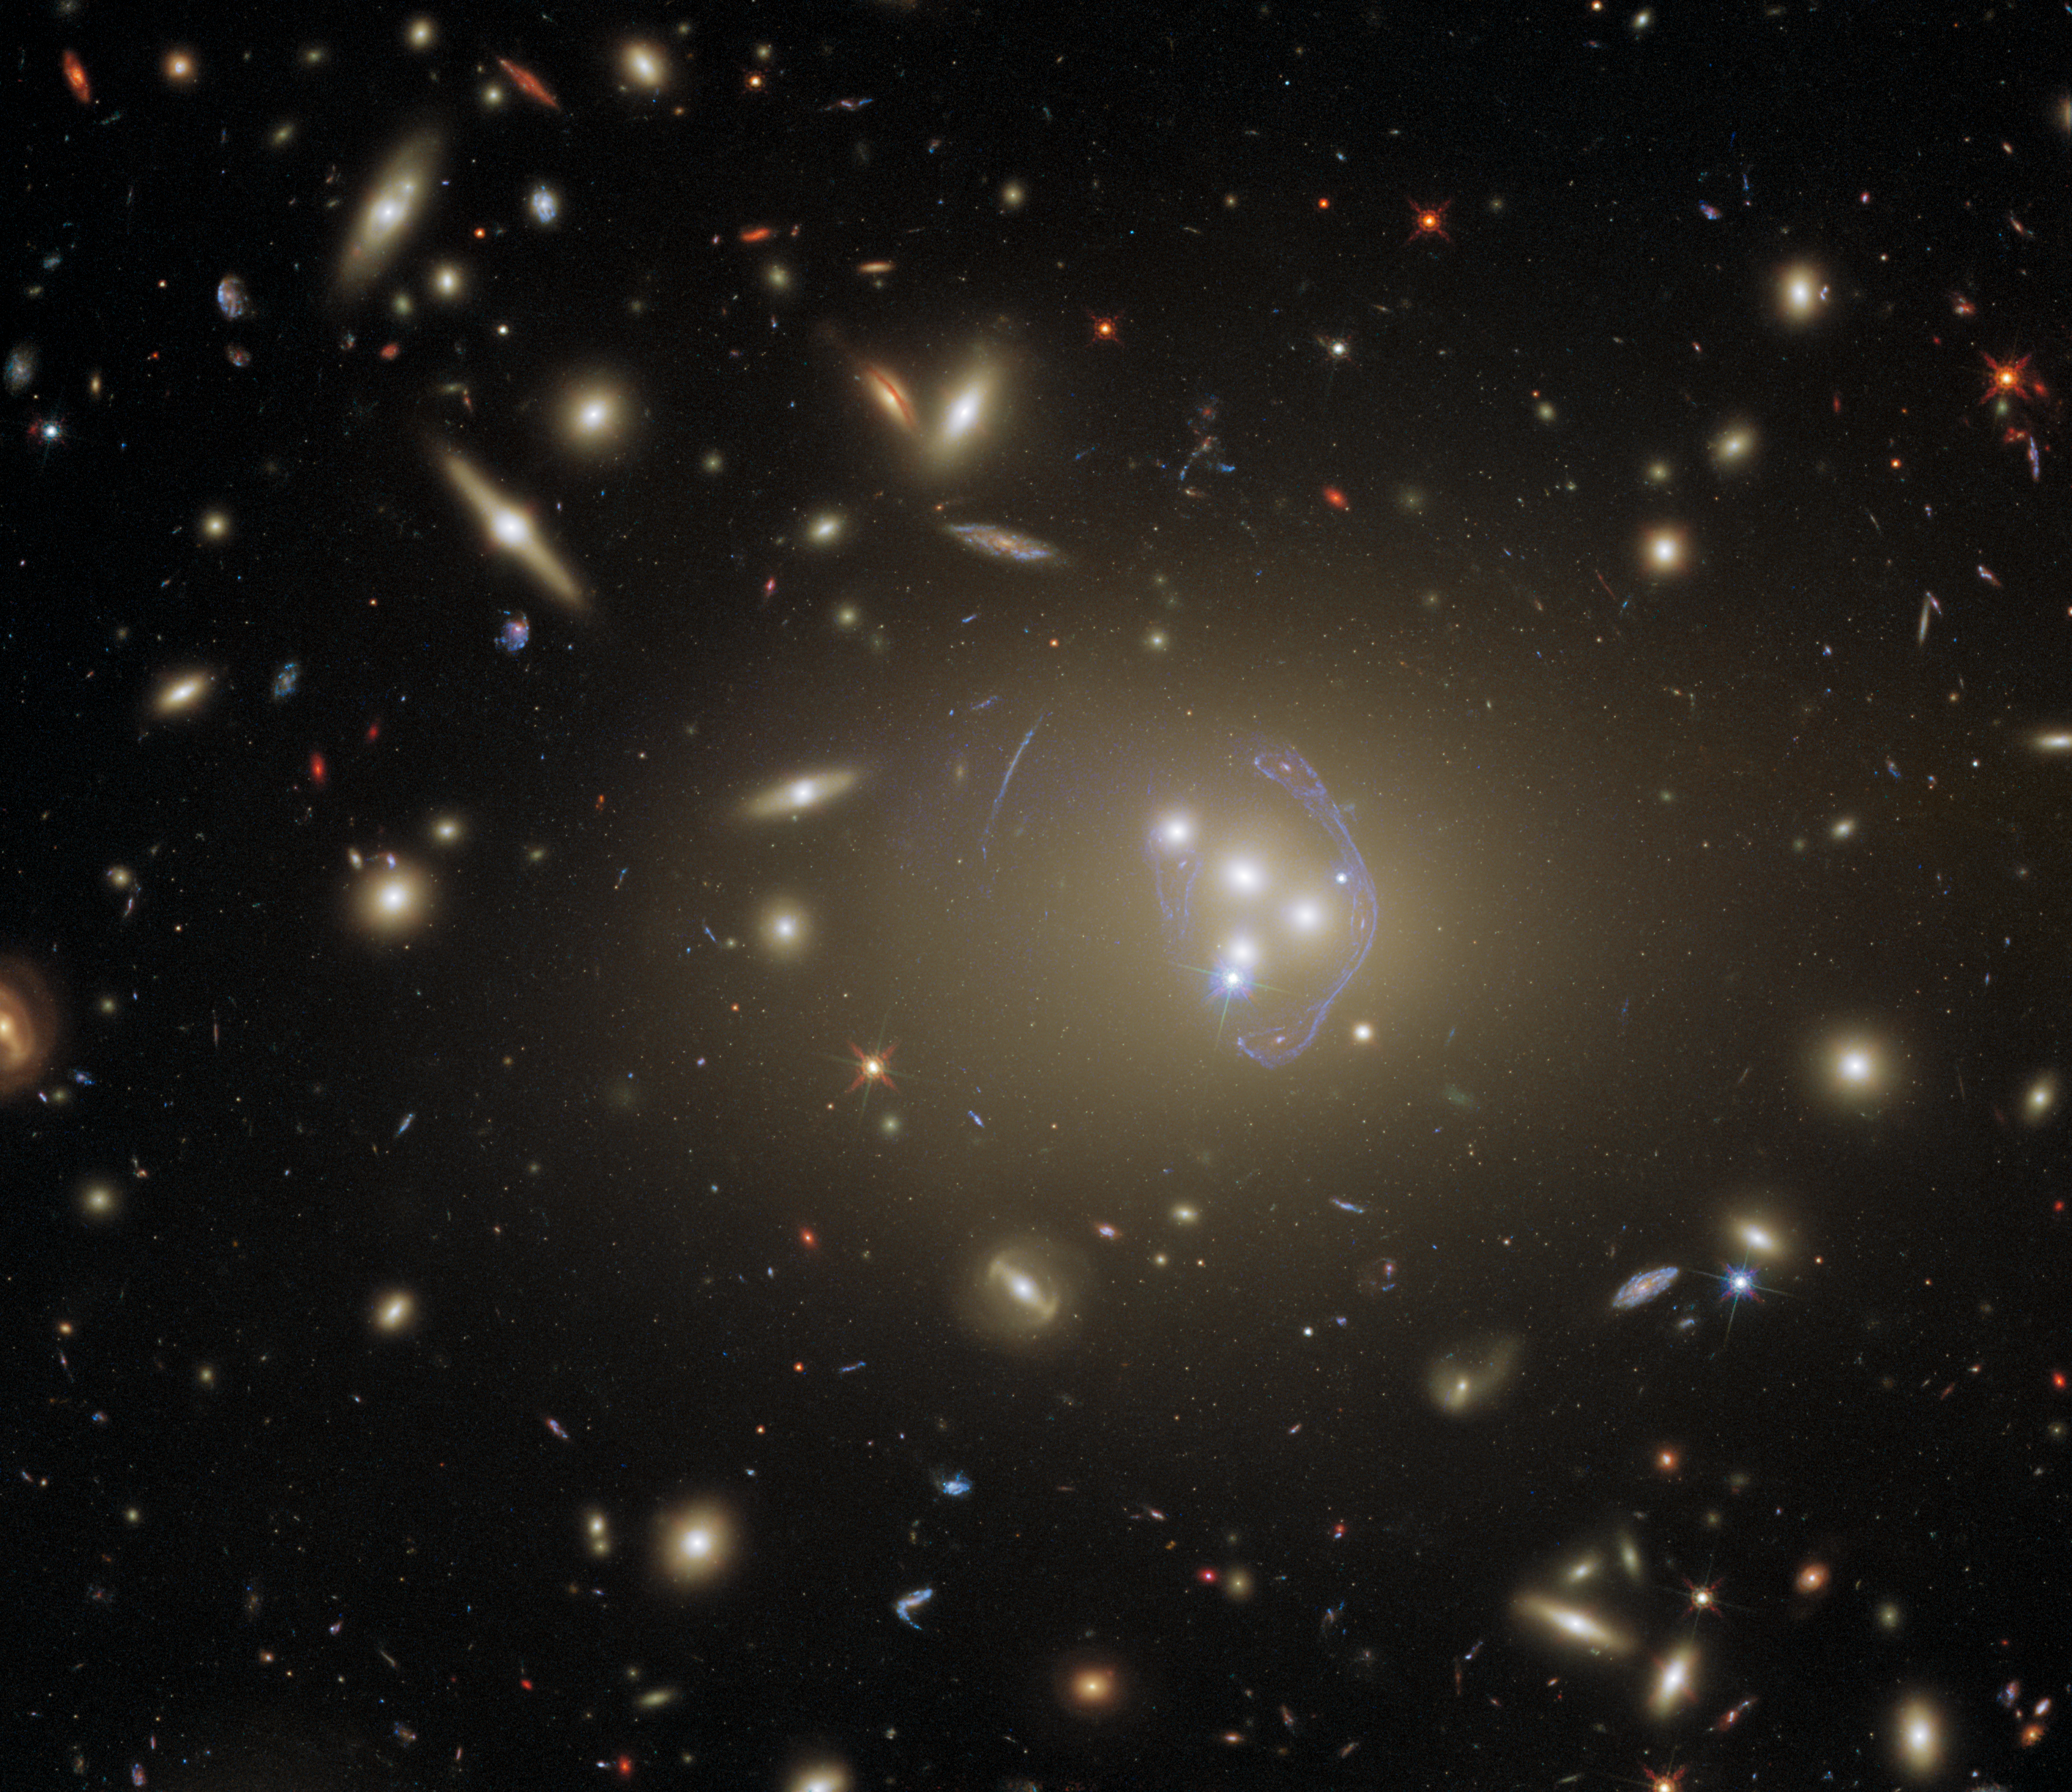

Our Giant Universe

This detailed image features Abell 3827, a galaxy cluster that offers a wealth of exciting possibilities for study. It was observed by Hubble in order to study dark matter, which is one of the greatest puzzles cosmologists face today. The science team used Hubble’s Advanced Camera for Surveys (ACS) and Wide Field Camera 3 (WFC3) to complete their observations. The two cameras have different specifications and can observe different parts of the electromagnetic spectrum, so using them both allowed the astronomers to collect more complete information. Abell 3827 has also been observed previously by Hubble, because of the interesting gravitational lens at its core.

Looking at this cluster of hundreds of galaxies, it is amazing to recall that until less than 100 years ago, many astronomers believed that the Milky Way was the only galaxy in the Universe. The possibility of other galaxies had been debated previously, but the matter was not truly settled until Edwin Hubble confirmed that the Great Andromeda Nebula was in fact far too distant to be part of the Milky Way. The Great Andromeda Nebula became the Andromeda Galaxy, and astronomers recognised that our Universe was much, much bigger than humanity had imagined. We can only imagine how Edwin Hubble — after whom the Hubble Space Telescope was named — would have felt if he’d seen this spectacular image of Abell 3827.

Credit: ESA/Hubble & NASA, R. Massey